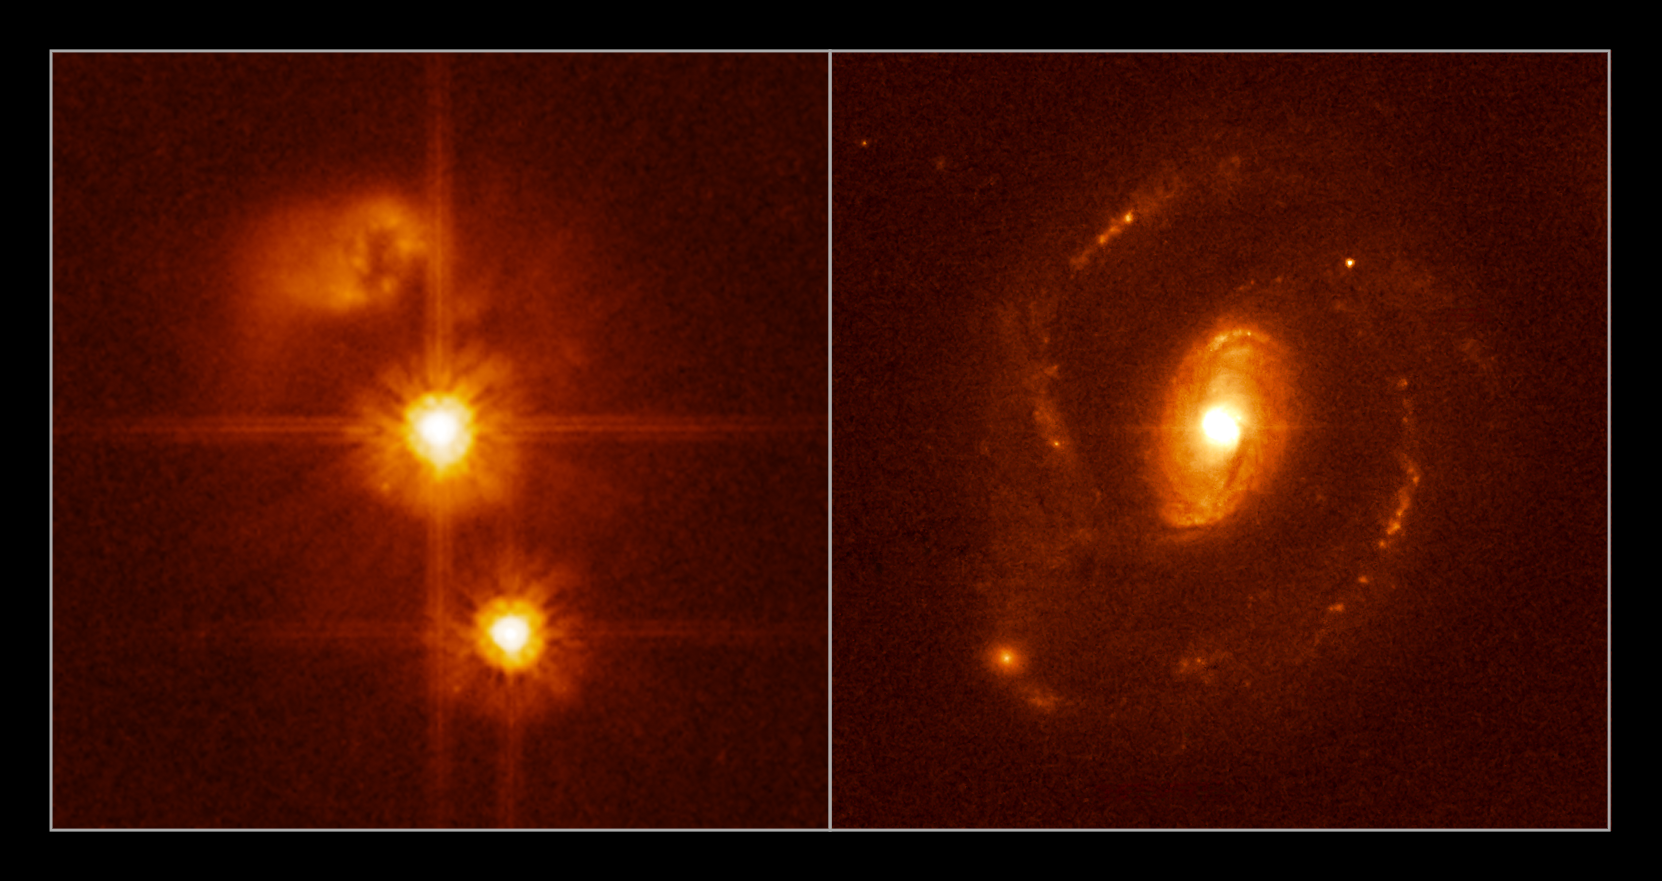

No-host quasar compared with a normal quasar

This figure shows two Hubble images of quasars from a sample of 20 relatively nearby quasars examined by a team of European astronomers two of the most powerful astronomical facilities available, the NASA/ESA Hubble Space Telescope and the ESO Very Large Telescope (VLT) at Cerro Paranal.

The team confidently concludes that the quasar on the left, HE0450-2958 (in the centre, distance about 5 billion light-years) does not have a massive host galaxy. The quasar HE1239-2426 to the right (at a distance of 1.5 billion light-years), has a normal host galaxy which displays large spiral arms. Although HE1239-2426 is much closer than HE0450-2958, the host galaxy of the latter would still be perfectly visible if it was as bright as the one of HE1239-2426.

The lack of a prominent host galaxy around a very bright quasar (HE0450-2958) suggests a rare case of a collision between a seemingly normal spiral galaxy and an exotic object harbouring a very massive black hole.

Also seen in the image to the left (above the quasar) is a strongly disturbed galaxy, showing all the signs of a recent collision. The VLT observations show it to be forming stars at a frantic rate. Below the quasar a foreground star is seen.

The two images have been scaled to exhibit the same linear scale.

The images were taken with the Advanced Camera for Surveys onboard the NASA/ESA Hubble Space Telescope.

Credit: NASA/ESA, ESO, Frédéric Courbin (Ecole Polytechnique Federale de Lausanne, Switzerland) & Pierre Magain (Universite de Liège, Belgium)